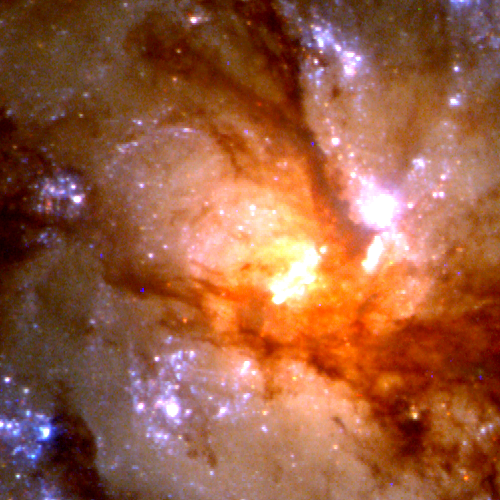

Close-Up of Star Formation in Antennae Galaxy

These close-up views of the cores of each galaxy show entrapped dust and gas funneled into the center. The nucleus of NGC 4038 (lower right) is obscured by dust which dims and reddens starlight by scattering the shorter, bluer wavelengths. This is also the reason the young star clusters in the dusty regions appear red instead of blue.

Credit: Brad Whitmore (STScI), and NASA/ESA